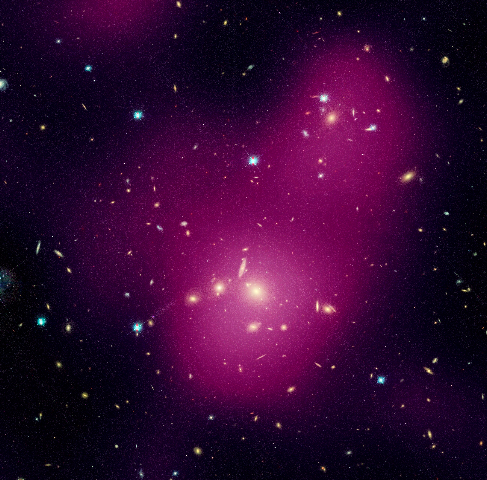

Hubble maps dark matter web in a large galaxy cluster (individual image 1)

A Hubble study pinpointed four main areas in the supercluster where dark matter has pooled into dense clumps. These areas match the location of hundreds of galaxies that have experienced a violent history in their passage from the outskirts of the supercluster into these dense regions. To make this image, astronomers superimposed the dark matter map over a Hubble visible-light image of the supercluster galaxies.

The image is part of the Space Telescope Abell 901/902 Galaxy Evolution Survey (STAGES), which covers one of the largest patches of sky ever observed by the Hubble telescope. The area surveyed is so wide that it took 80 Hubble images to cover the entire field.

Hubble's Advanced Camera for Surveys made the observations in June and July 2005 and in January 2006.

Credit for the Hubble images: NASA, ESA, C. Heymans (University of British Columbia, Vancouver), M. Gray (University of Nottingham, U.K.), M. Barden (Innsbruck), and the STAGES collaboration
Credit for the ground-based image: ESO, C. Wolf (Oxford University, U.K.), K. Meisenheimer (Max-Planck Institute for Astronomy, Heidelberg), and the COMBO-17 collaboration